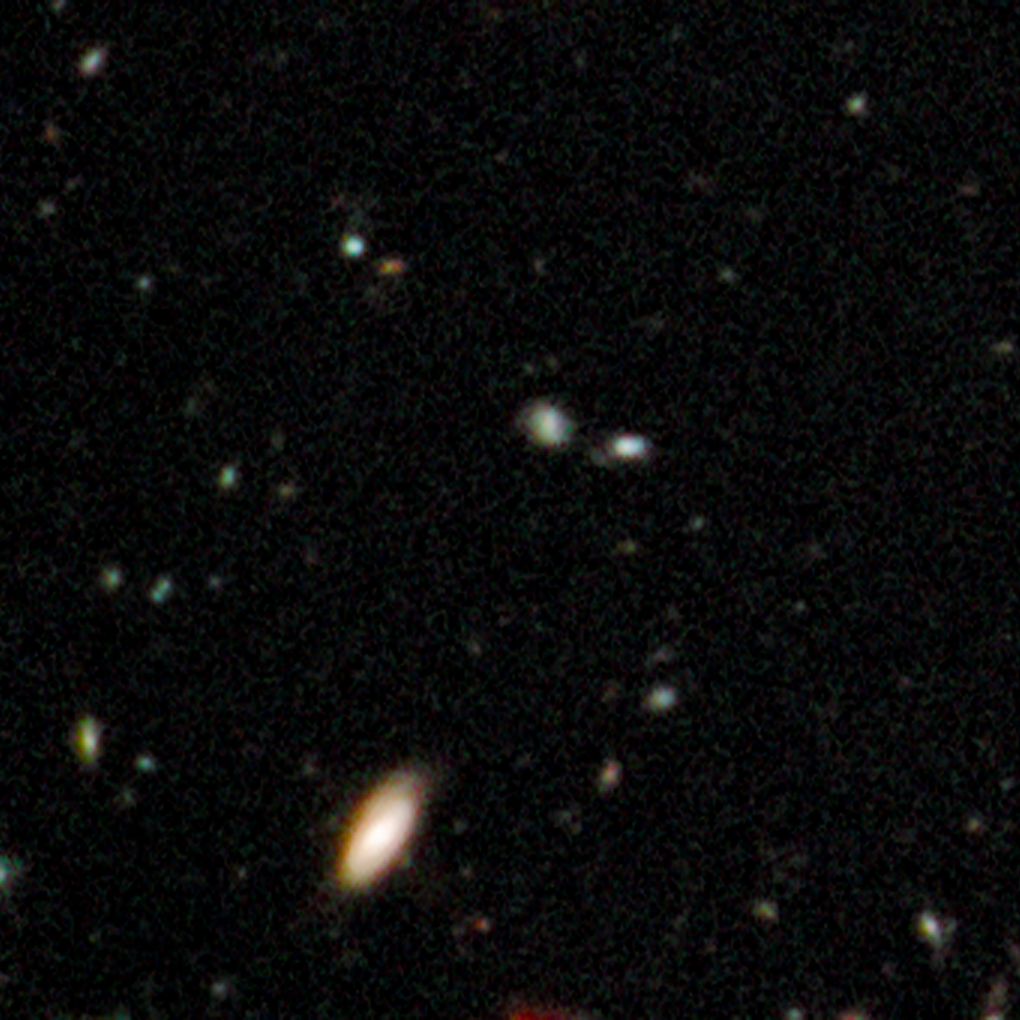

Early galaxies in HUDF WFC3/IR, close up 2

This Hubble image taken by the observatory's new Wide Field Camera 3 in infrared light highlights some of the oldest galaxies ever seen.

Credit: NASA, ESA, G. Illingworth (UCO/Lick Observatory and University of California, Santa Cruz) and the HUDF09 Team